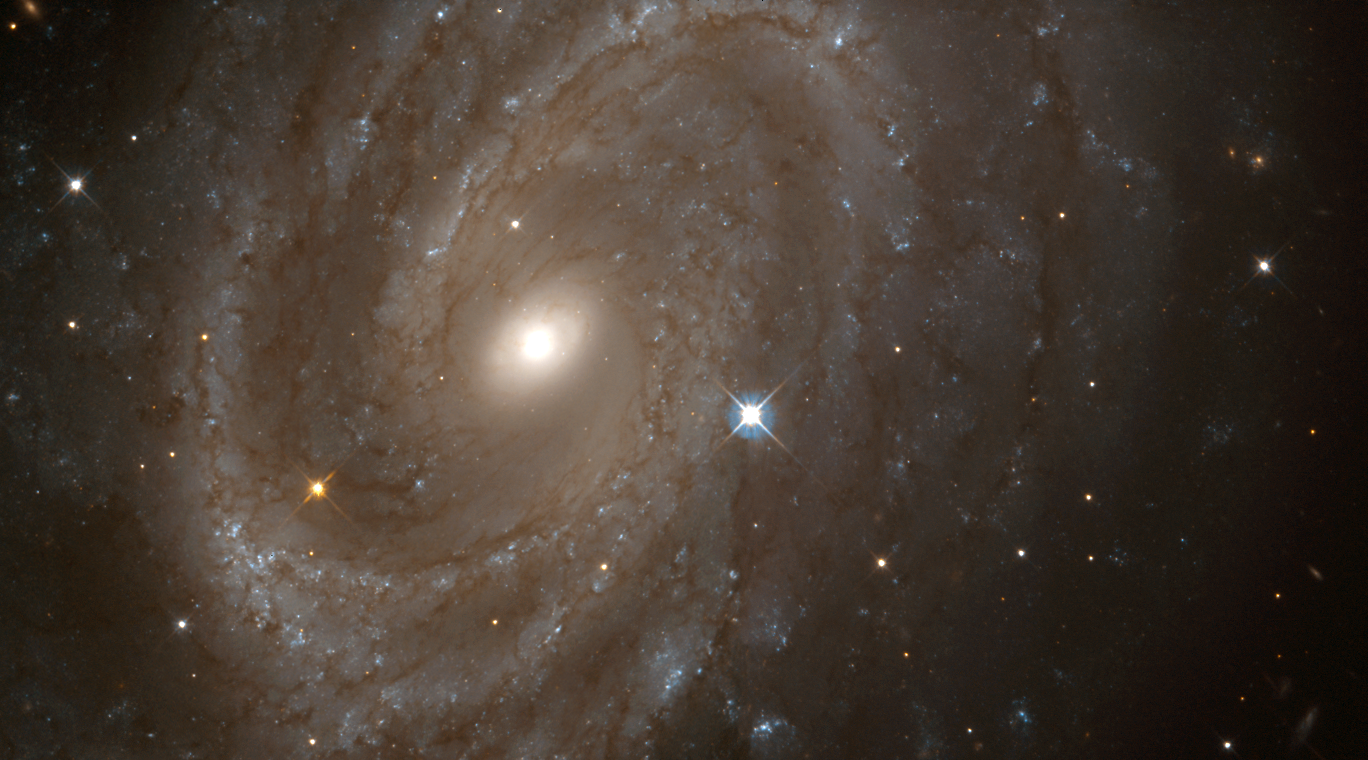

Hubble finds variable stars in distant spiral galaxy

A NASA/ESA Hubble Space Telescope (HST) view of the magnificent spiral galaxy NGC 4603, the most distant galaxy in which a special class of pulsating stars called Cepheid variables have been found. It is associated with the Centaurus cluster, one of the most massive assemblages of galaxies in the nearby universe.

The Local Group of galaxies, of which the Milky Way is a member, is moving in the direction of Centaurus at a speed of more than a million miles an hour (approx. 450 kilometres per second) under the influence of the gravitational pull of the matter in that direction.

Credit: Jeffrey Newman (Univ. of California at Berkeley) and NASA/ESA